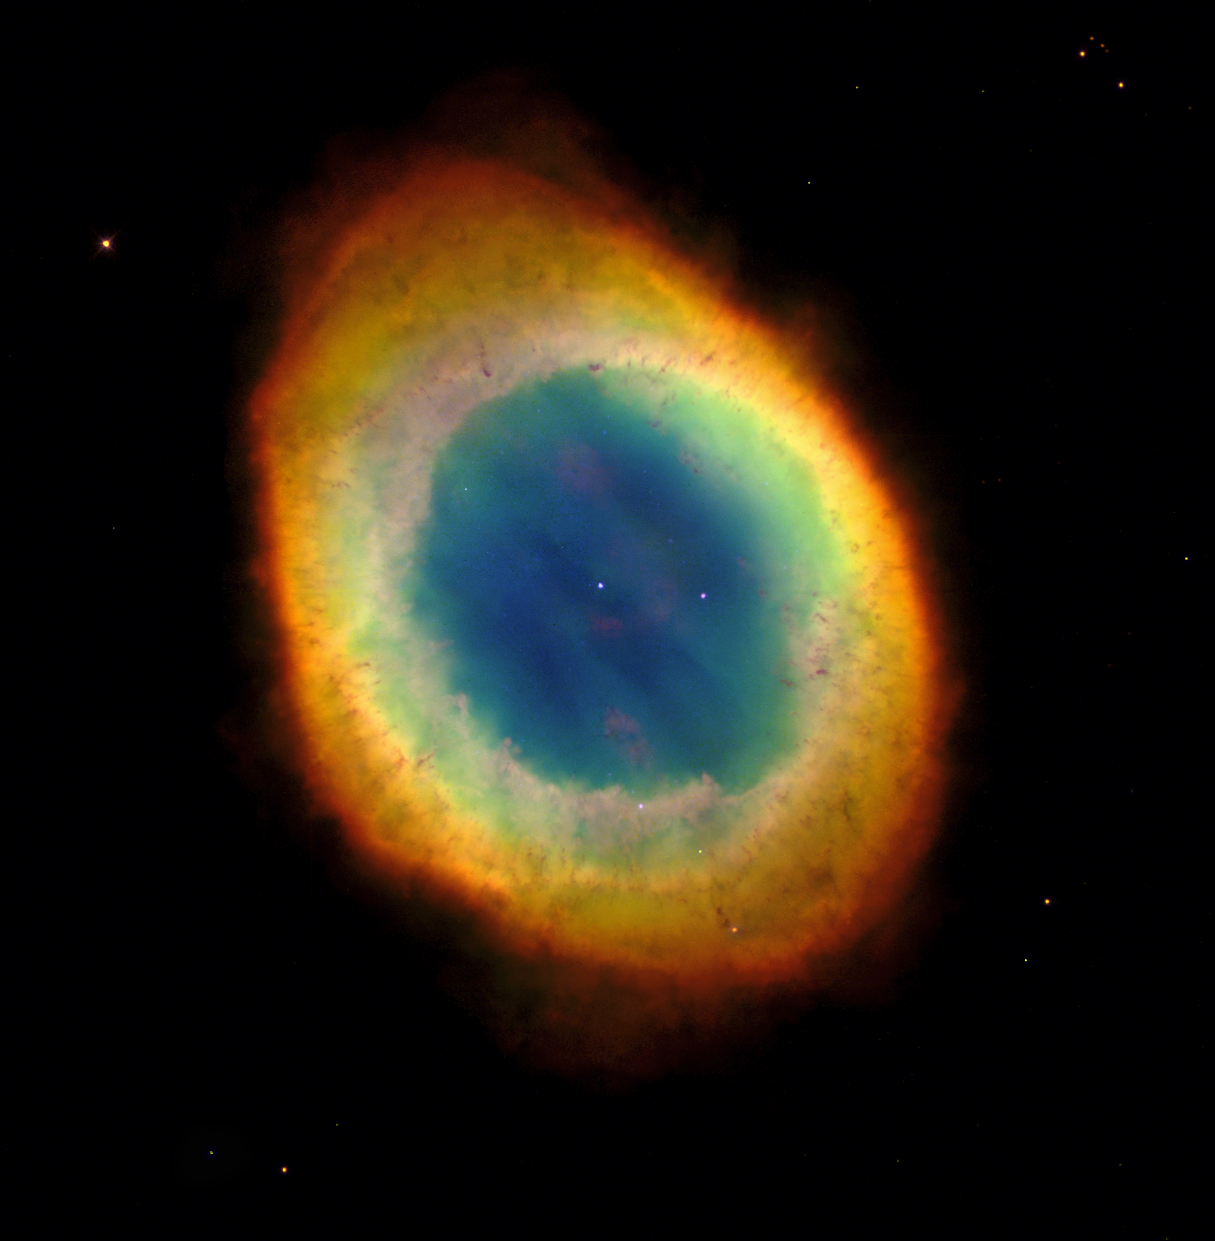

Looking down a barrel of gas at a doomed star

The NASA/ESA Hubble Space Telescope has captured the sharpest view yet of the most famous of all planetary nebulae: the Ring Nebula (M57). In this October 1998 image, the telescope has looked down a barrel of gas cast off by a dying star thousands of years ago. This photo reveals elongated dark clumps of material embedded in the gas at the edge of the nebula; the dying central star floating in a blue haze of hot gas. The nebula is about a light-year in diameter and is located some 2, 000 light-years from Earth in the direction of the constellation Lyra.

Credit: Hubble Heritage Team (AURA/STScI/NASA/ESA)